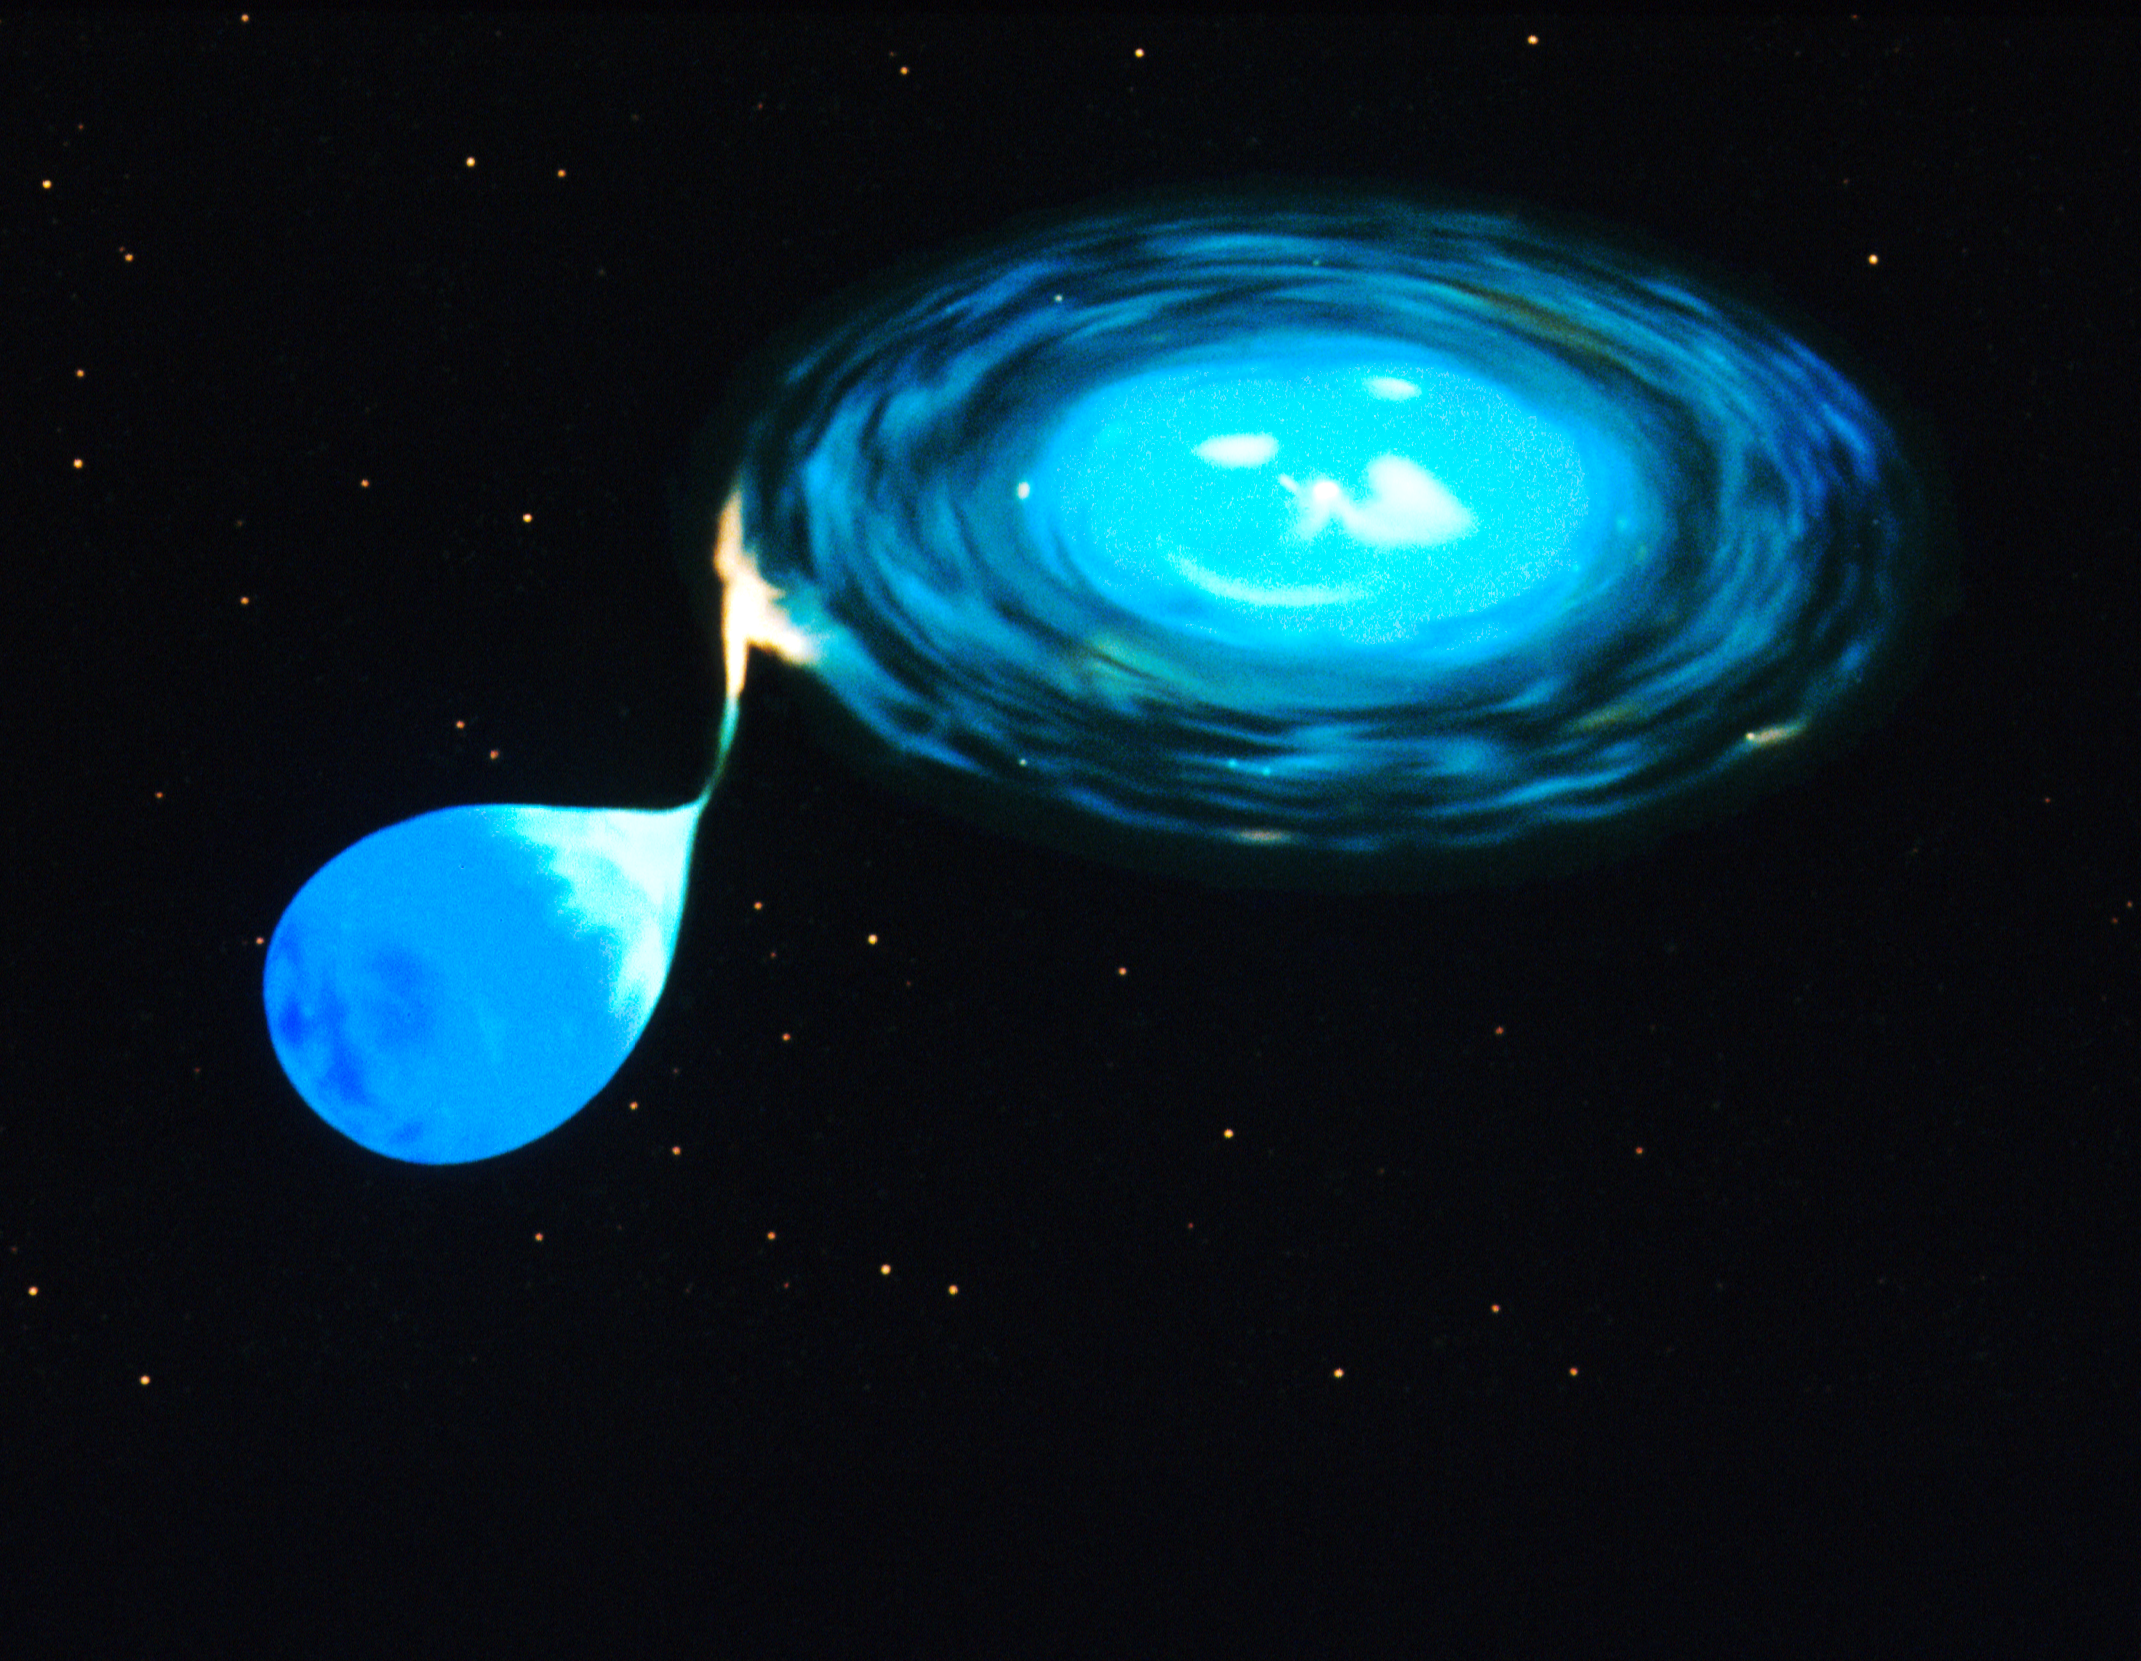

Illustration of X-ray burster

Illustration of X-ray burster

Credit: NASA & ESA